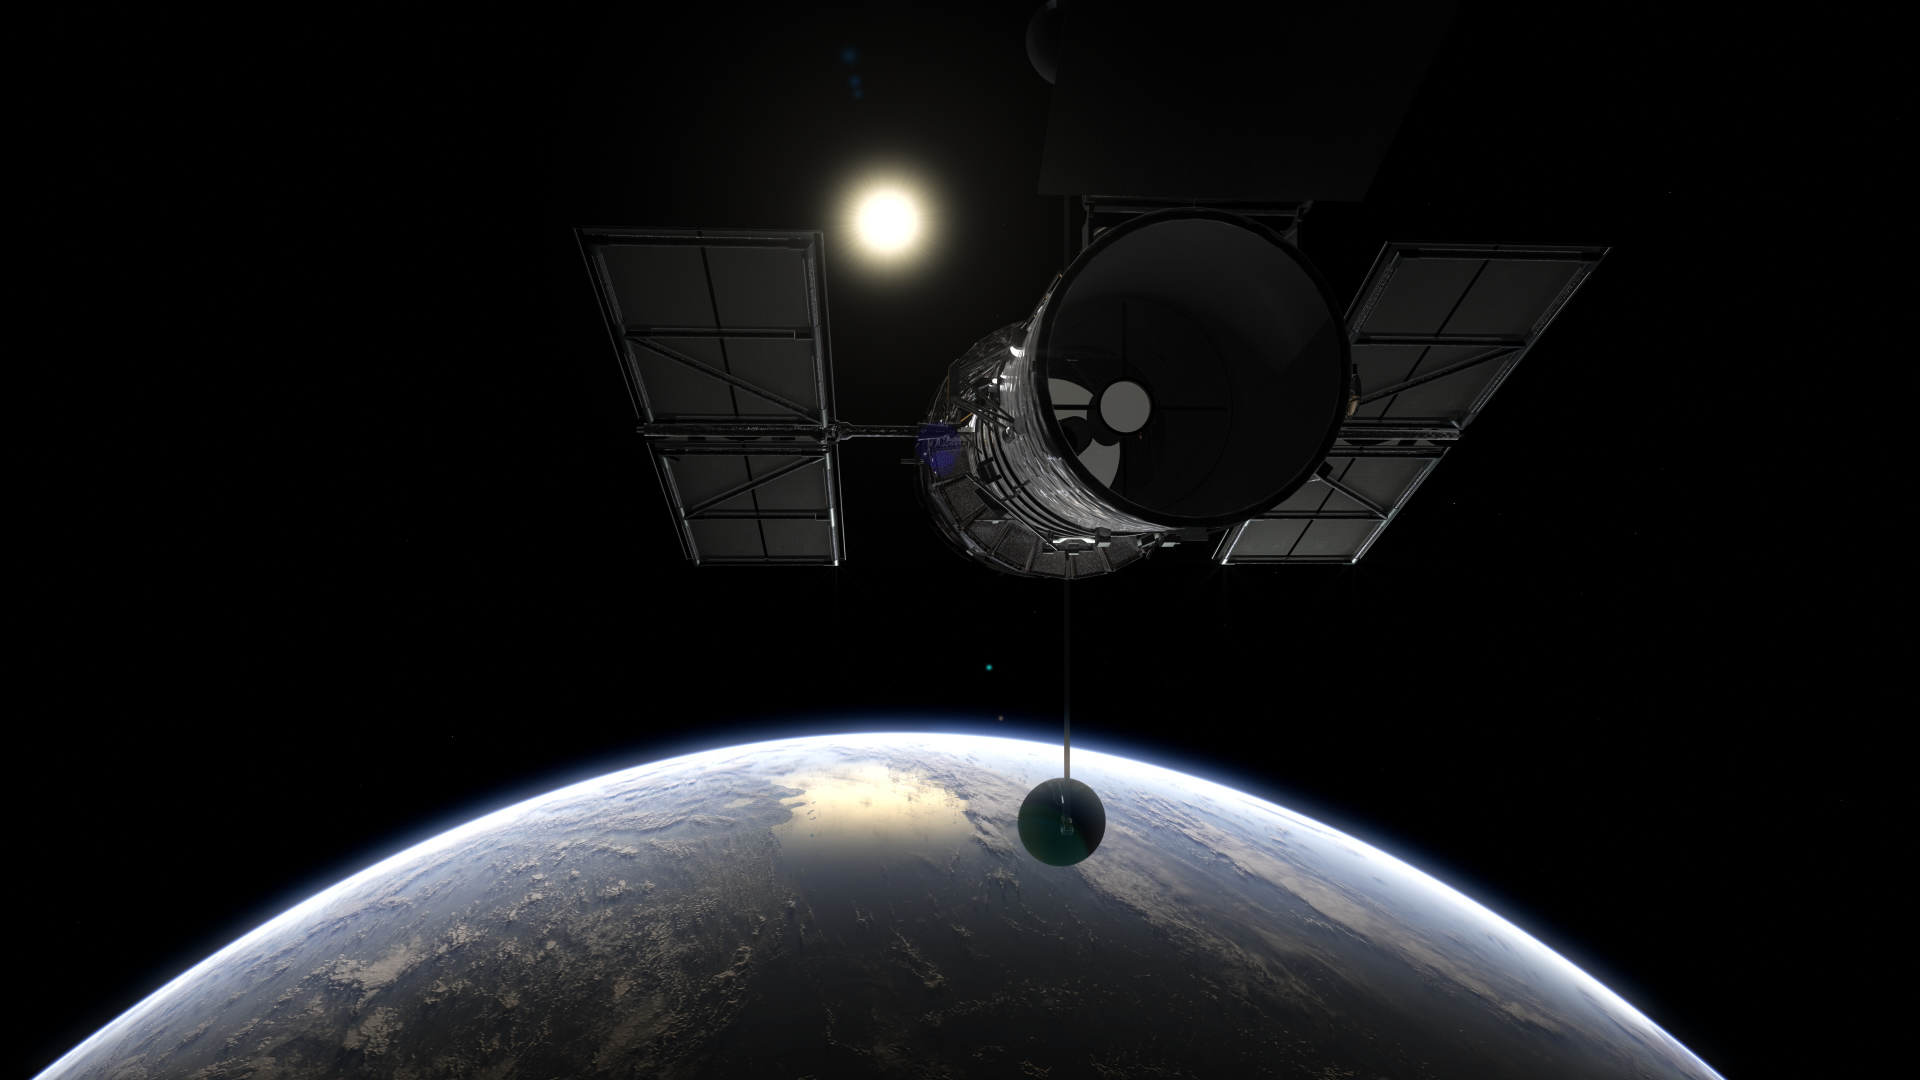

Still from Hubblecast episode 87: The many mysteries of Pluto

This is a still from Hubblecast 87 which explores the many mysteries of the dwarf planet Pluto.

Credit: ESA/NASA